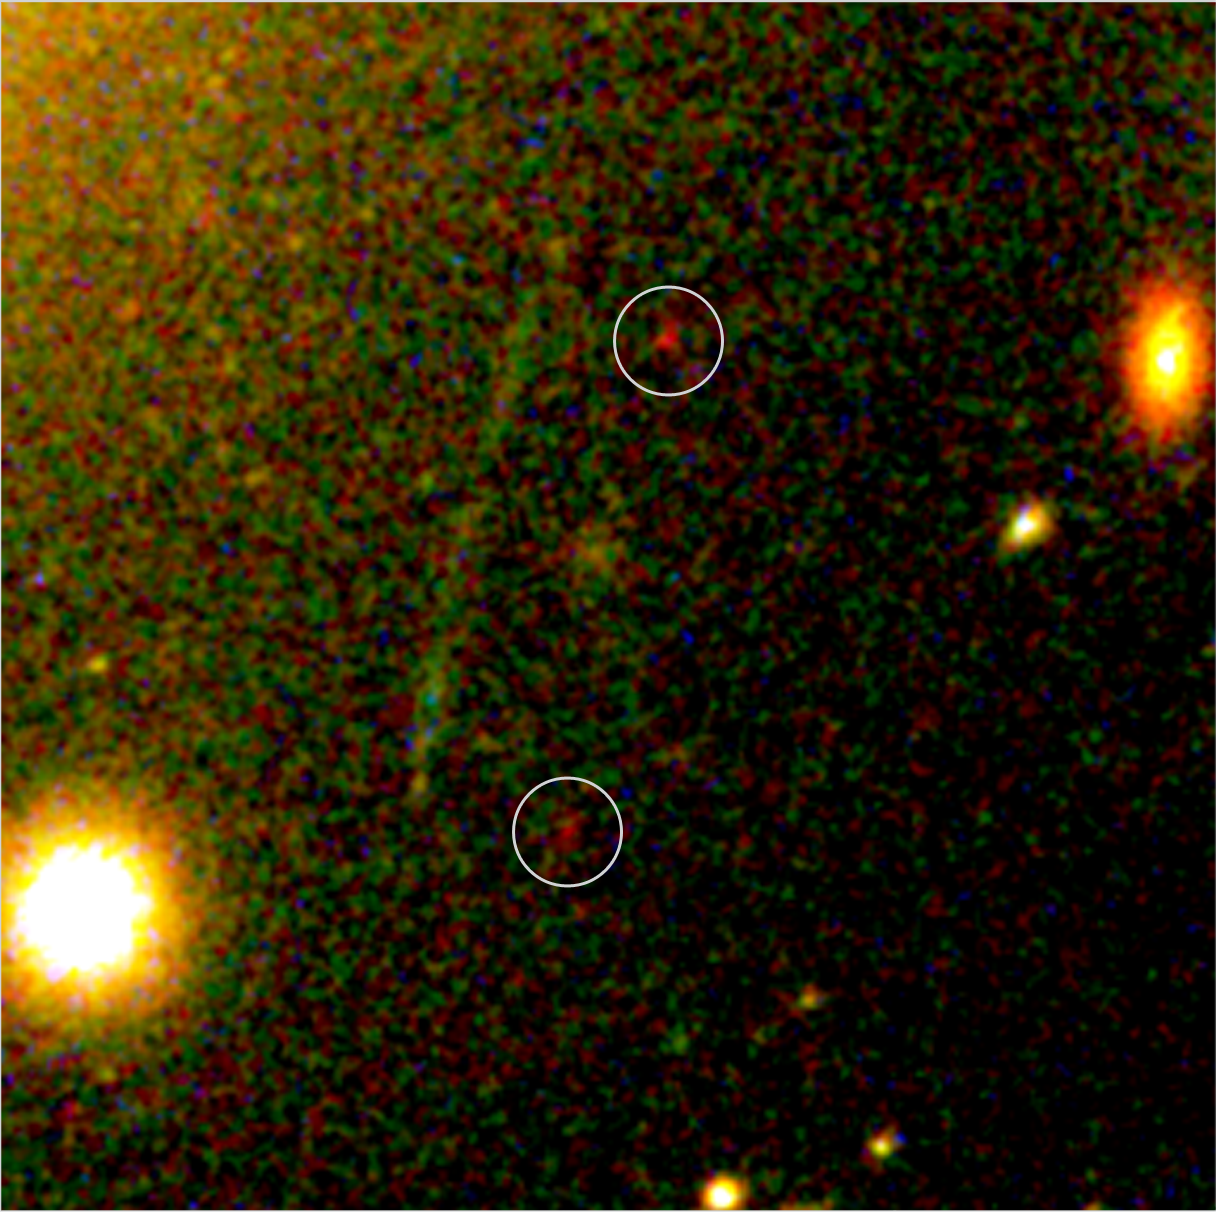

Hubble and Keck's newly discovered galaxy 'building block'

This NASA/ESA Hubble Space Telescope image shows a newly discovered very small, faint galaxy 'building block' found via a unique collaboration between ground- and space-based telescopes. Hubble and the 10 metre Keck Telescopes in Hawaii joined forces using a galaxy cluster which acts as a gravitational lens to detect what scientists believe is one of the smallest and most distant objects ever found. The galaxy cluster Abell 2218 was used by a team of European and American astronomers led by Richard Ellis (Caltech, USA) in their systematic search for intrinsically faint distant star-forming systems. Without the help from this cluster's magnifying power (it magnifies by around 30 times) the galaxy building block would have been undetectable with present facilities. The object is seen distorted into two nearly identical, very red 'images' by the gravitational lens. The image pair represents the magnified result of a single background object gravitationally lensed by Abell 2218 and viewed at a distance of 13.4 billion light-years. The intriguing object contains only one million stars, far fewer than a mature galaxy, and Ellis and co-workers believe it is very young. Such young star-forming systems of low mass at early cosmic times are likely to be the objects from which the mature galaxies around us today have formed.

Credit: ESA, NASA, Richard Ellis (Caltech, USA) and Jean-Paul Kneib (Observatoire Midi-Pyrénées, France)